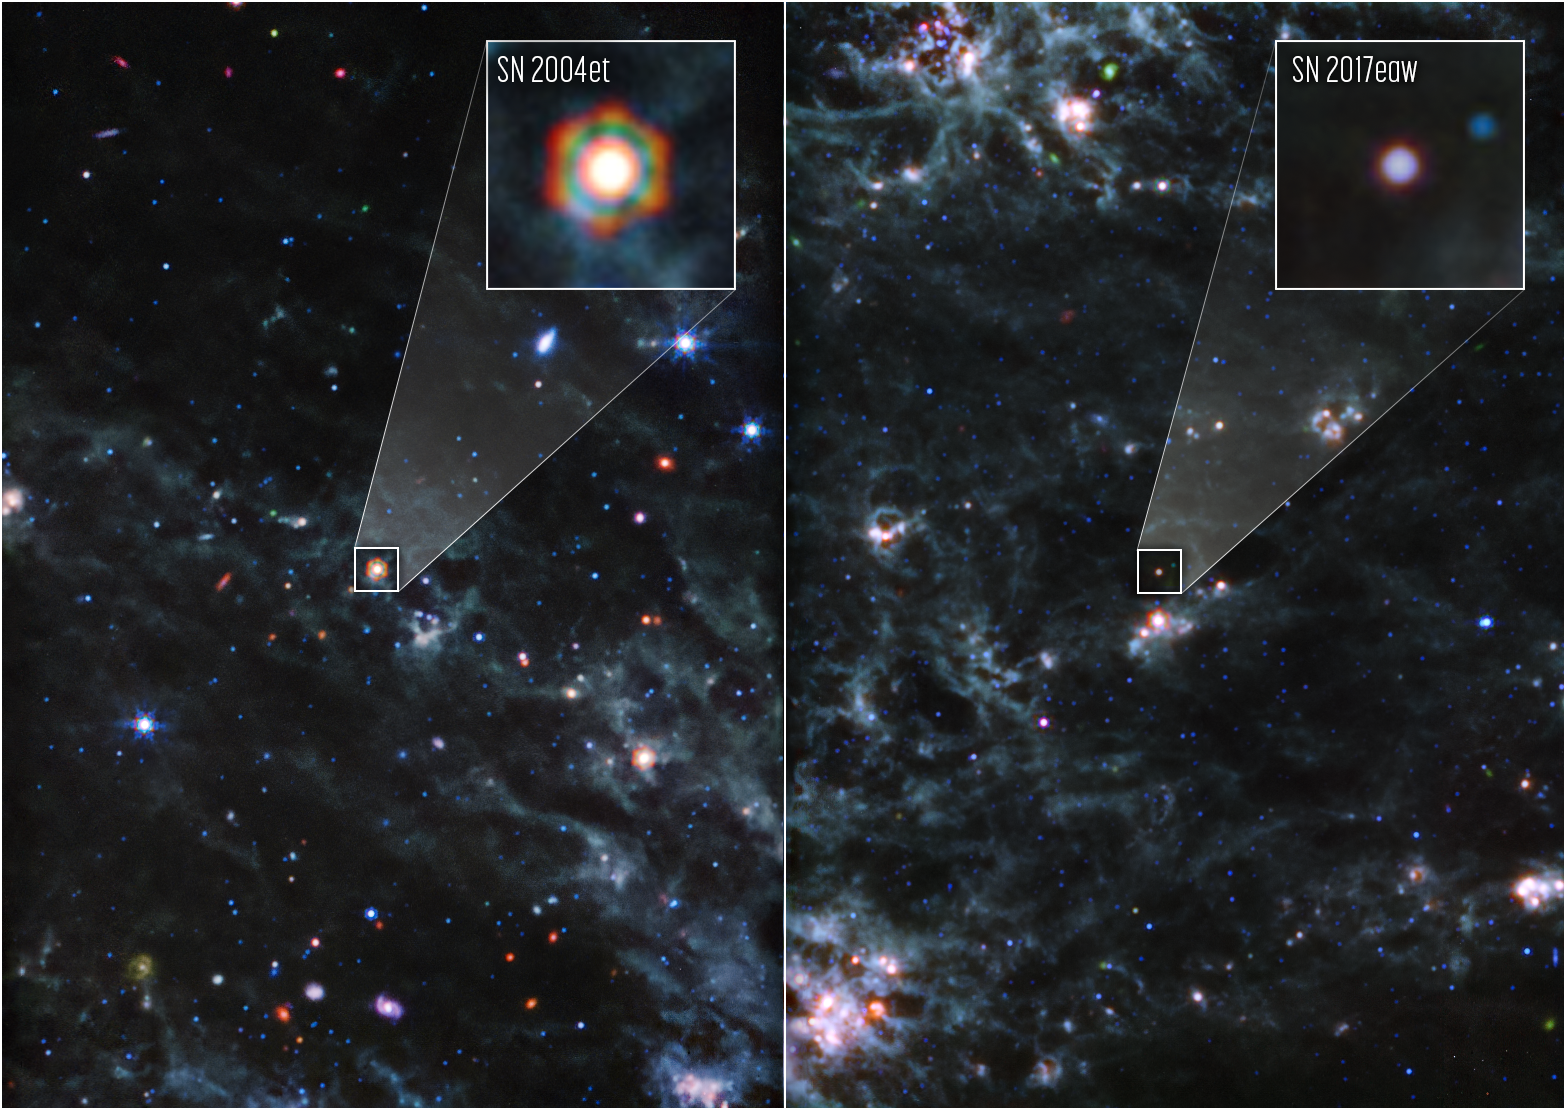

Dusty supernovae (MIRI)

Images from the NASA/ESA/CSA James Webb Space Telescope’s MIRI (Mid-Infrared Instrument) reveal large amounts of dust from two Type II supernovae, Supernova 2004et (SN2004 et) and Supernova 2017eaw (SN 2017eaw), located 22 million light-years away from Earth in spiral galaxy NGC 6946. The large amounts of dust found around these supernovae support the theory that supernovae played a key role in supplying dust to the early Universe.

SN 2004et is highlighted in the left panel of this image, and SN 2017eaw in the right panel. Webb’s exquisite sensitivity and capability to observe in the mid-infrared allow it to detect the cooler dust that survived the internal shocks reverberating in the aftermath of the dying stars’ explosions. In these images, the bluer colours indicate hotter dust, while red is cooler dust. The hexagonal shape of SN 2004et in Webb’s image is an artefact of the telescope’s mirror and struts — when the bright light of a point source is observed, the light interacts with the sharp edges of the telescope, creating diffraction spikes.

The new Webb discovery is the first breakthrough in the study of dust production from supernovae since the detection of newly formed dust in relatively nearby (170,000 light-years) Supernova 1987A.

In SN 2004et, researchers using Webb found more than 5,000 Earth masses of dust, rivalling the amount of dust found in SN 1987A. That’s why SN 2004et appears brighter and redder in Webb images. SN 2017eaw is currently hotter, with less dust (bluer in Webb observations), but in 13 years, researchers expect it to appear similar to how SN 2004et does now.

In these images, blue, green, and red were assigned to Webb’s MIRI data at 10; 11.3, 12.8, and 15; and 18 and 21 microns (F1000W; F1130W, F1280W, and F1500W; and F1800W and F2100W, respectively).

SN 2004et and SN2017eaw are the first of five targets included in this program. The observations were completed as part of Webb General Observer program 2666. The paper was published in the Monthly Notices of the Royal Astronomical Society on 5 July.

MIRI was developed as a partnership between Europe and the USA: the main partners are ESA, a consortium of nationally funded European institutes, the Jet Propulsion Laboratory (JPL), and the University of Arizona. The instrument was nationally funded by the European Consortium under the auspices of the European Space Agency. The principal investigator leading the MIRI European Consortium is Gillian Wright (UK Astronomy Technology Centre) and the MIRI American science lead is George Rieke (University of Arizona).

Credit: NASA, ESA, CSA, Ori Fox (STScI), Melissa Shahbandeh (STScI), A. Pagan (STScI)